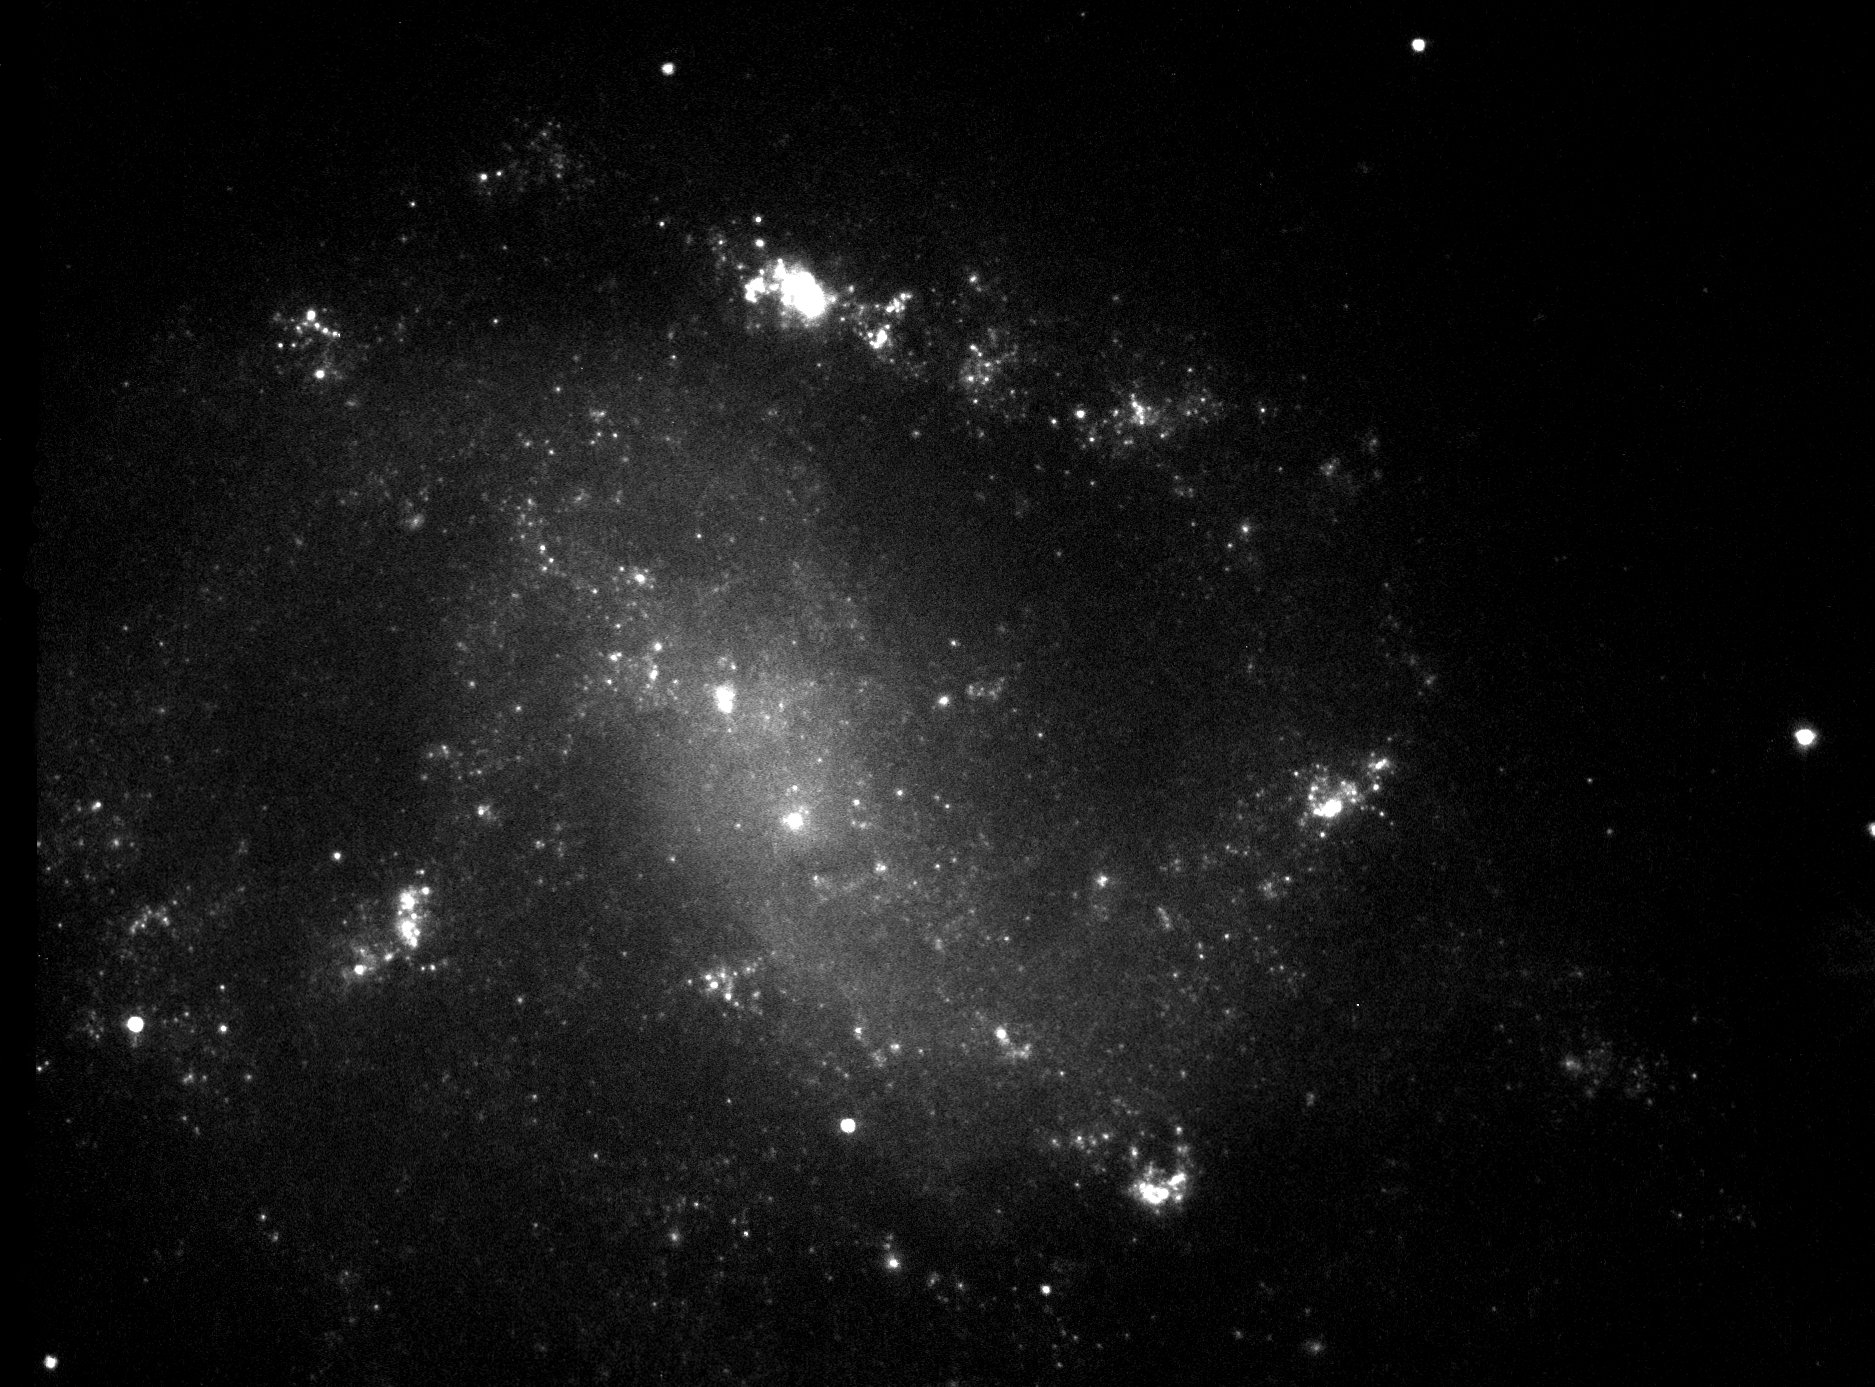

First close look at gamma-ray burst host galaxy ESO 184-G82

The galaxy ESO 184-G82 was host to a combined gamma-ray burst and supernova explosion seen first time in 25 April 1998. The galaxy is a barred spiral of type SBbc which is a loosely wound spiral galaxy with a central bar. These galaxies are typically star-forming, and this galaxy is no exception. In its spiral arms large clumps of star-forming regions are visible.

This Hubble observation was carried out 12 June 2000. The field of view of the image is 45 x 35 arcseconds.

Credit: ESA, Stephen Holland (Danish Centre for Astrophysics with the HST), Jens Hjorth, Johan Fynbo (University of Copenhagen)